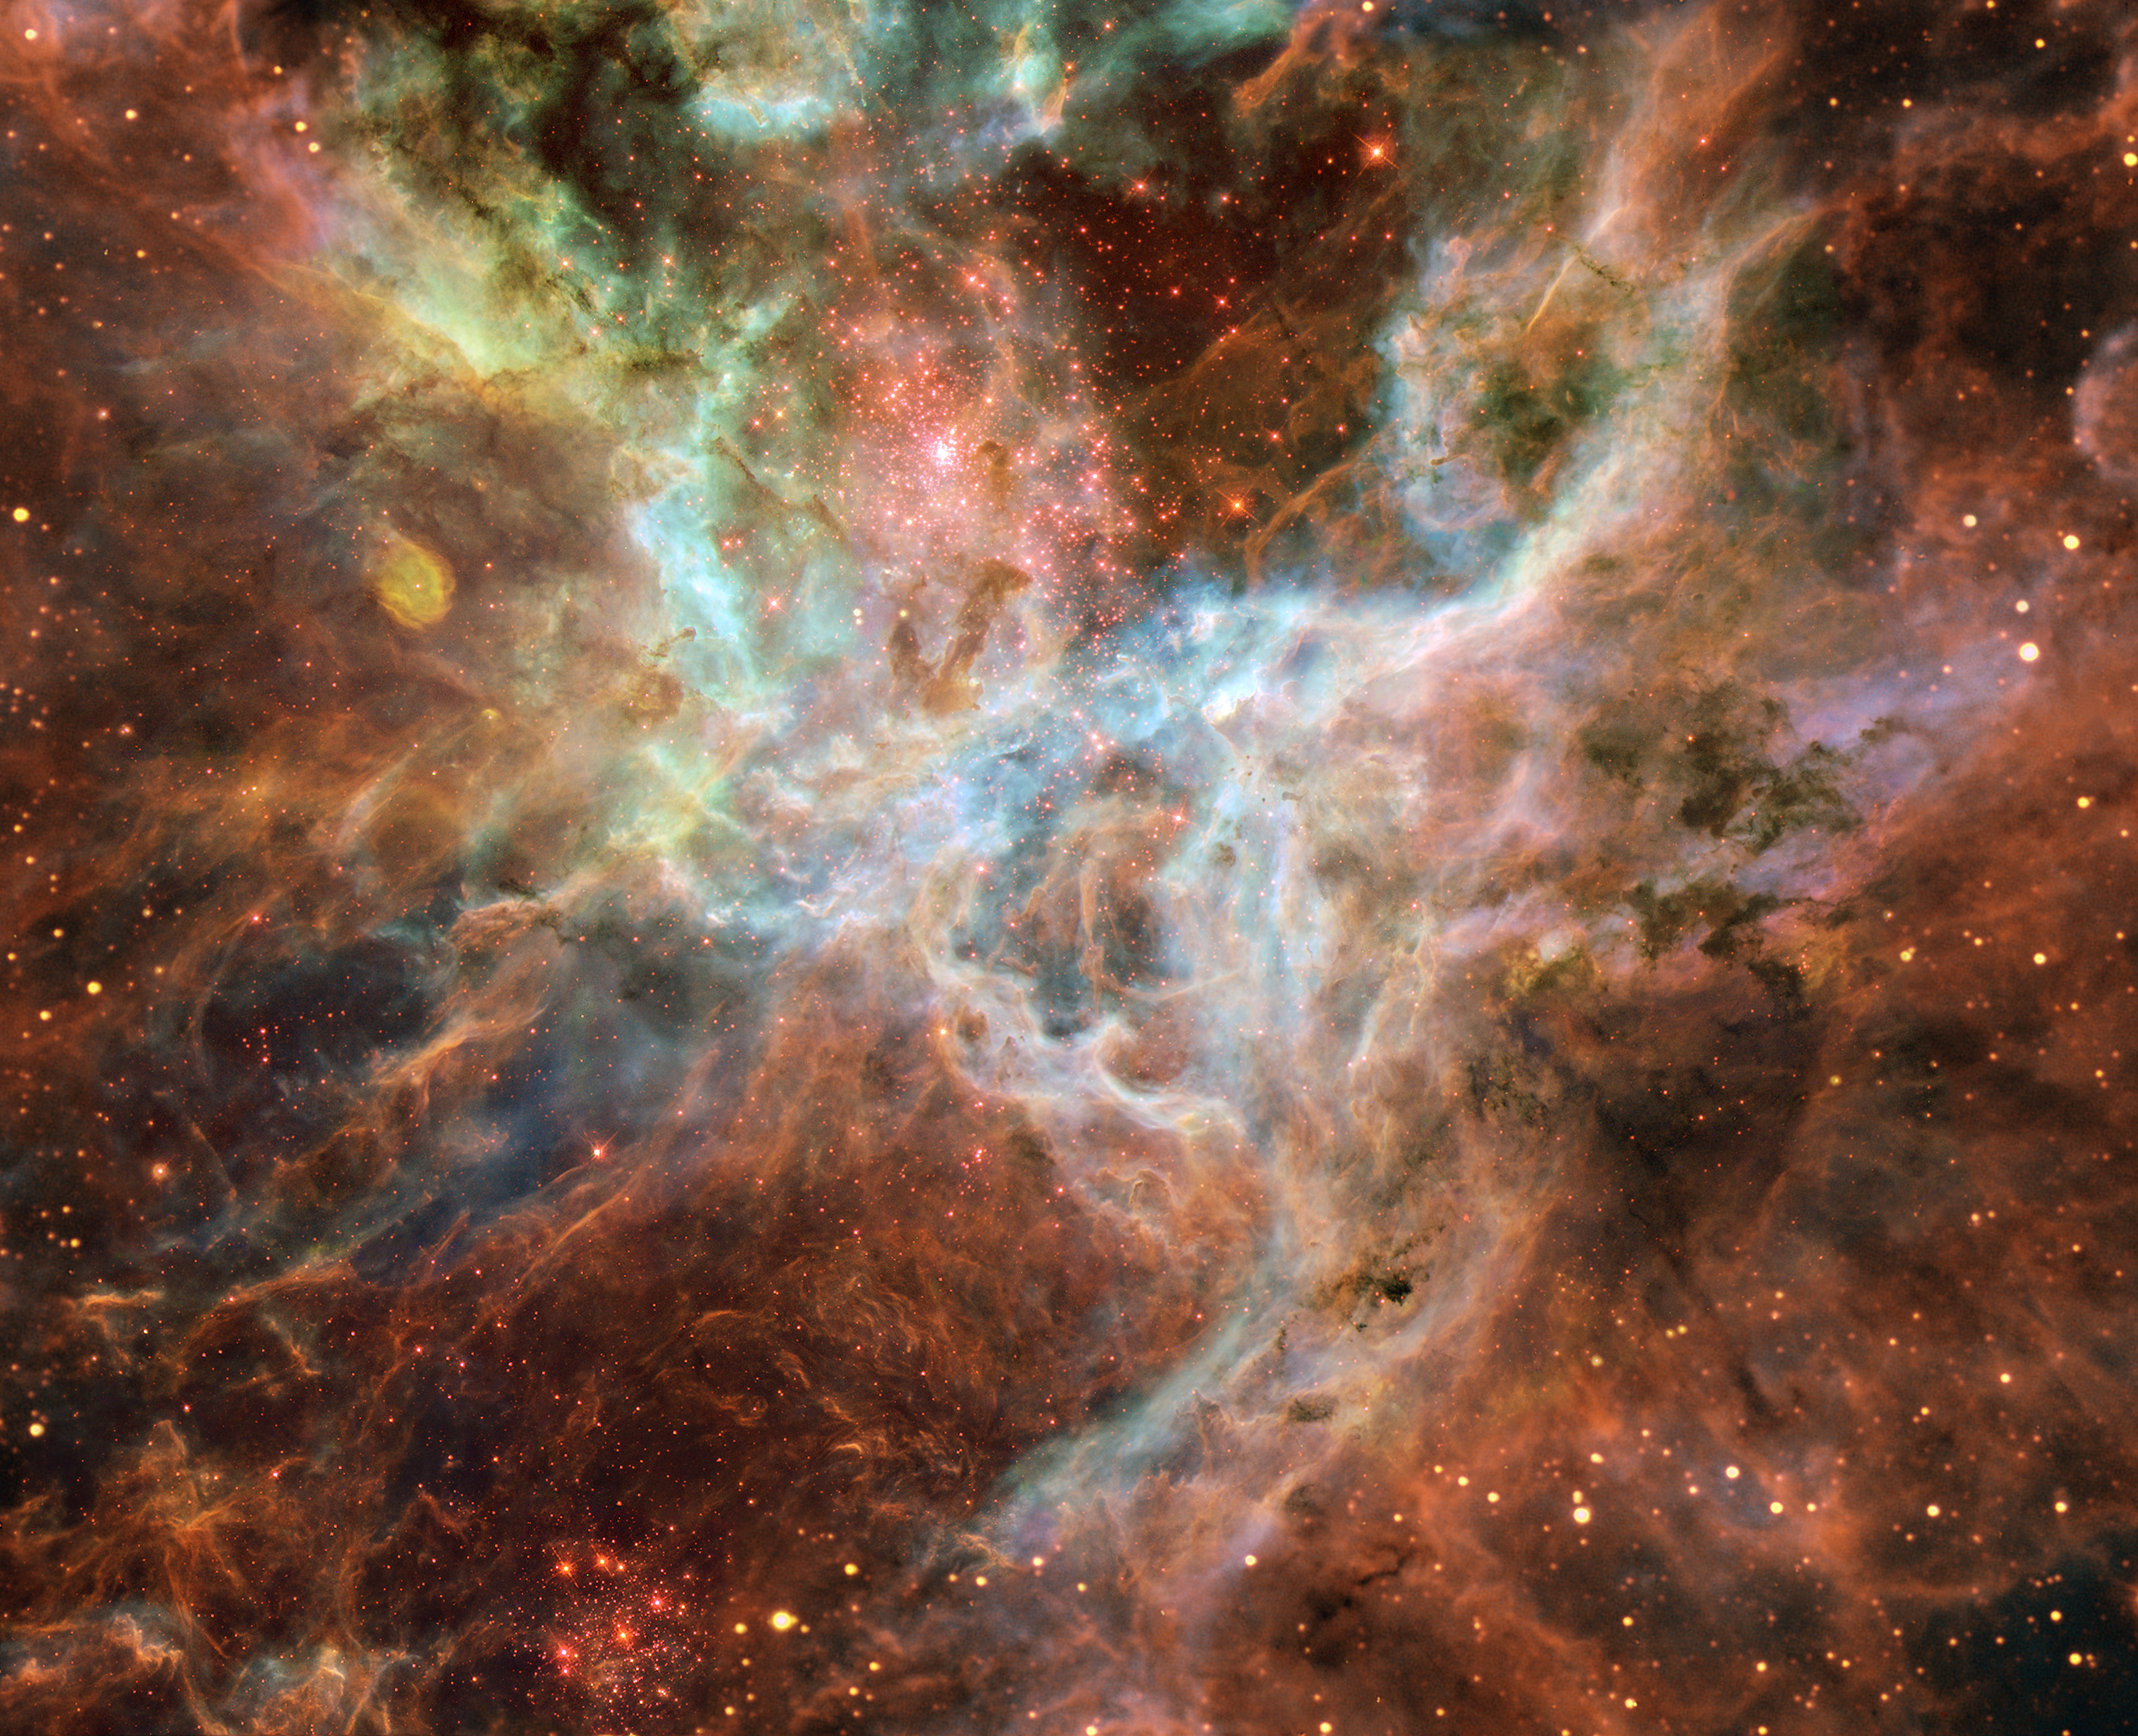

Symphony of colours in the Tarantula

The Tarantula is situated 170,000 light-years away in the Large Magellanic Cloud (LMC) in the Southern sky and is clearly visible to the naked eye as a large milky patch. Astronomers believe that this smallish irregular galaxy is currently going through a violent period in its life. It is orbiting around the Milky Way and has had several close encounters with it. It is believed that the interaction with the Milky Way has caused an episode of energetic star formation - part of which is visible as the Tarantula Nebula.

Just above the centre of the image there is a huge cluster of very hot stars called R136. The stars in R136 are also among the most massive stars we know. R136 is also a very young cluster, its oldest stars being "just" 5 million years old or so. Its smallest stars, however, are still forming, so astronomers observe R136 to try to understand the early stages of stellar evolution. Near the lower edge of the image we find the star cluster Hodge 301. Hodge 301 is almost 10 times older than R136. Some of the stars in Hodge 301 are so old that they have already exploded as supernovae. The shockwave from this explosion has compressed the gas in the Tarantula into the filaments and sheets that are seen around the cluster.

This mosaic of the Tarantula Nebula consists of images from the NASA/ESA Hubble Space Telescope's Wide Field and Planetary Camera 2 (WFPC2) and was created by 23 year old amateur astronomer Danny LaCrue. The image was constructed by 15 individual exposures taken through three narrow-band filters allowing light from ionised oxygen (501 nm, shown as blue), hydrogen-alpha (656 nm, shown as green) and ionised sulphur (672 nm, shown as red). The exposure time for the individual WFPC2 images vary between 800 and 2800 seconds in each filter. The Hubble data have been superimposed onto images taken through matching narrow-band filters with the European Southern Observatory's New Technology Telescope at the La Silla Observatory, Chile. Additional image processing was done by the Hubble European Space Agency Information Centre.

Credit: ESA/NASA, ESO and Danny LaCrue